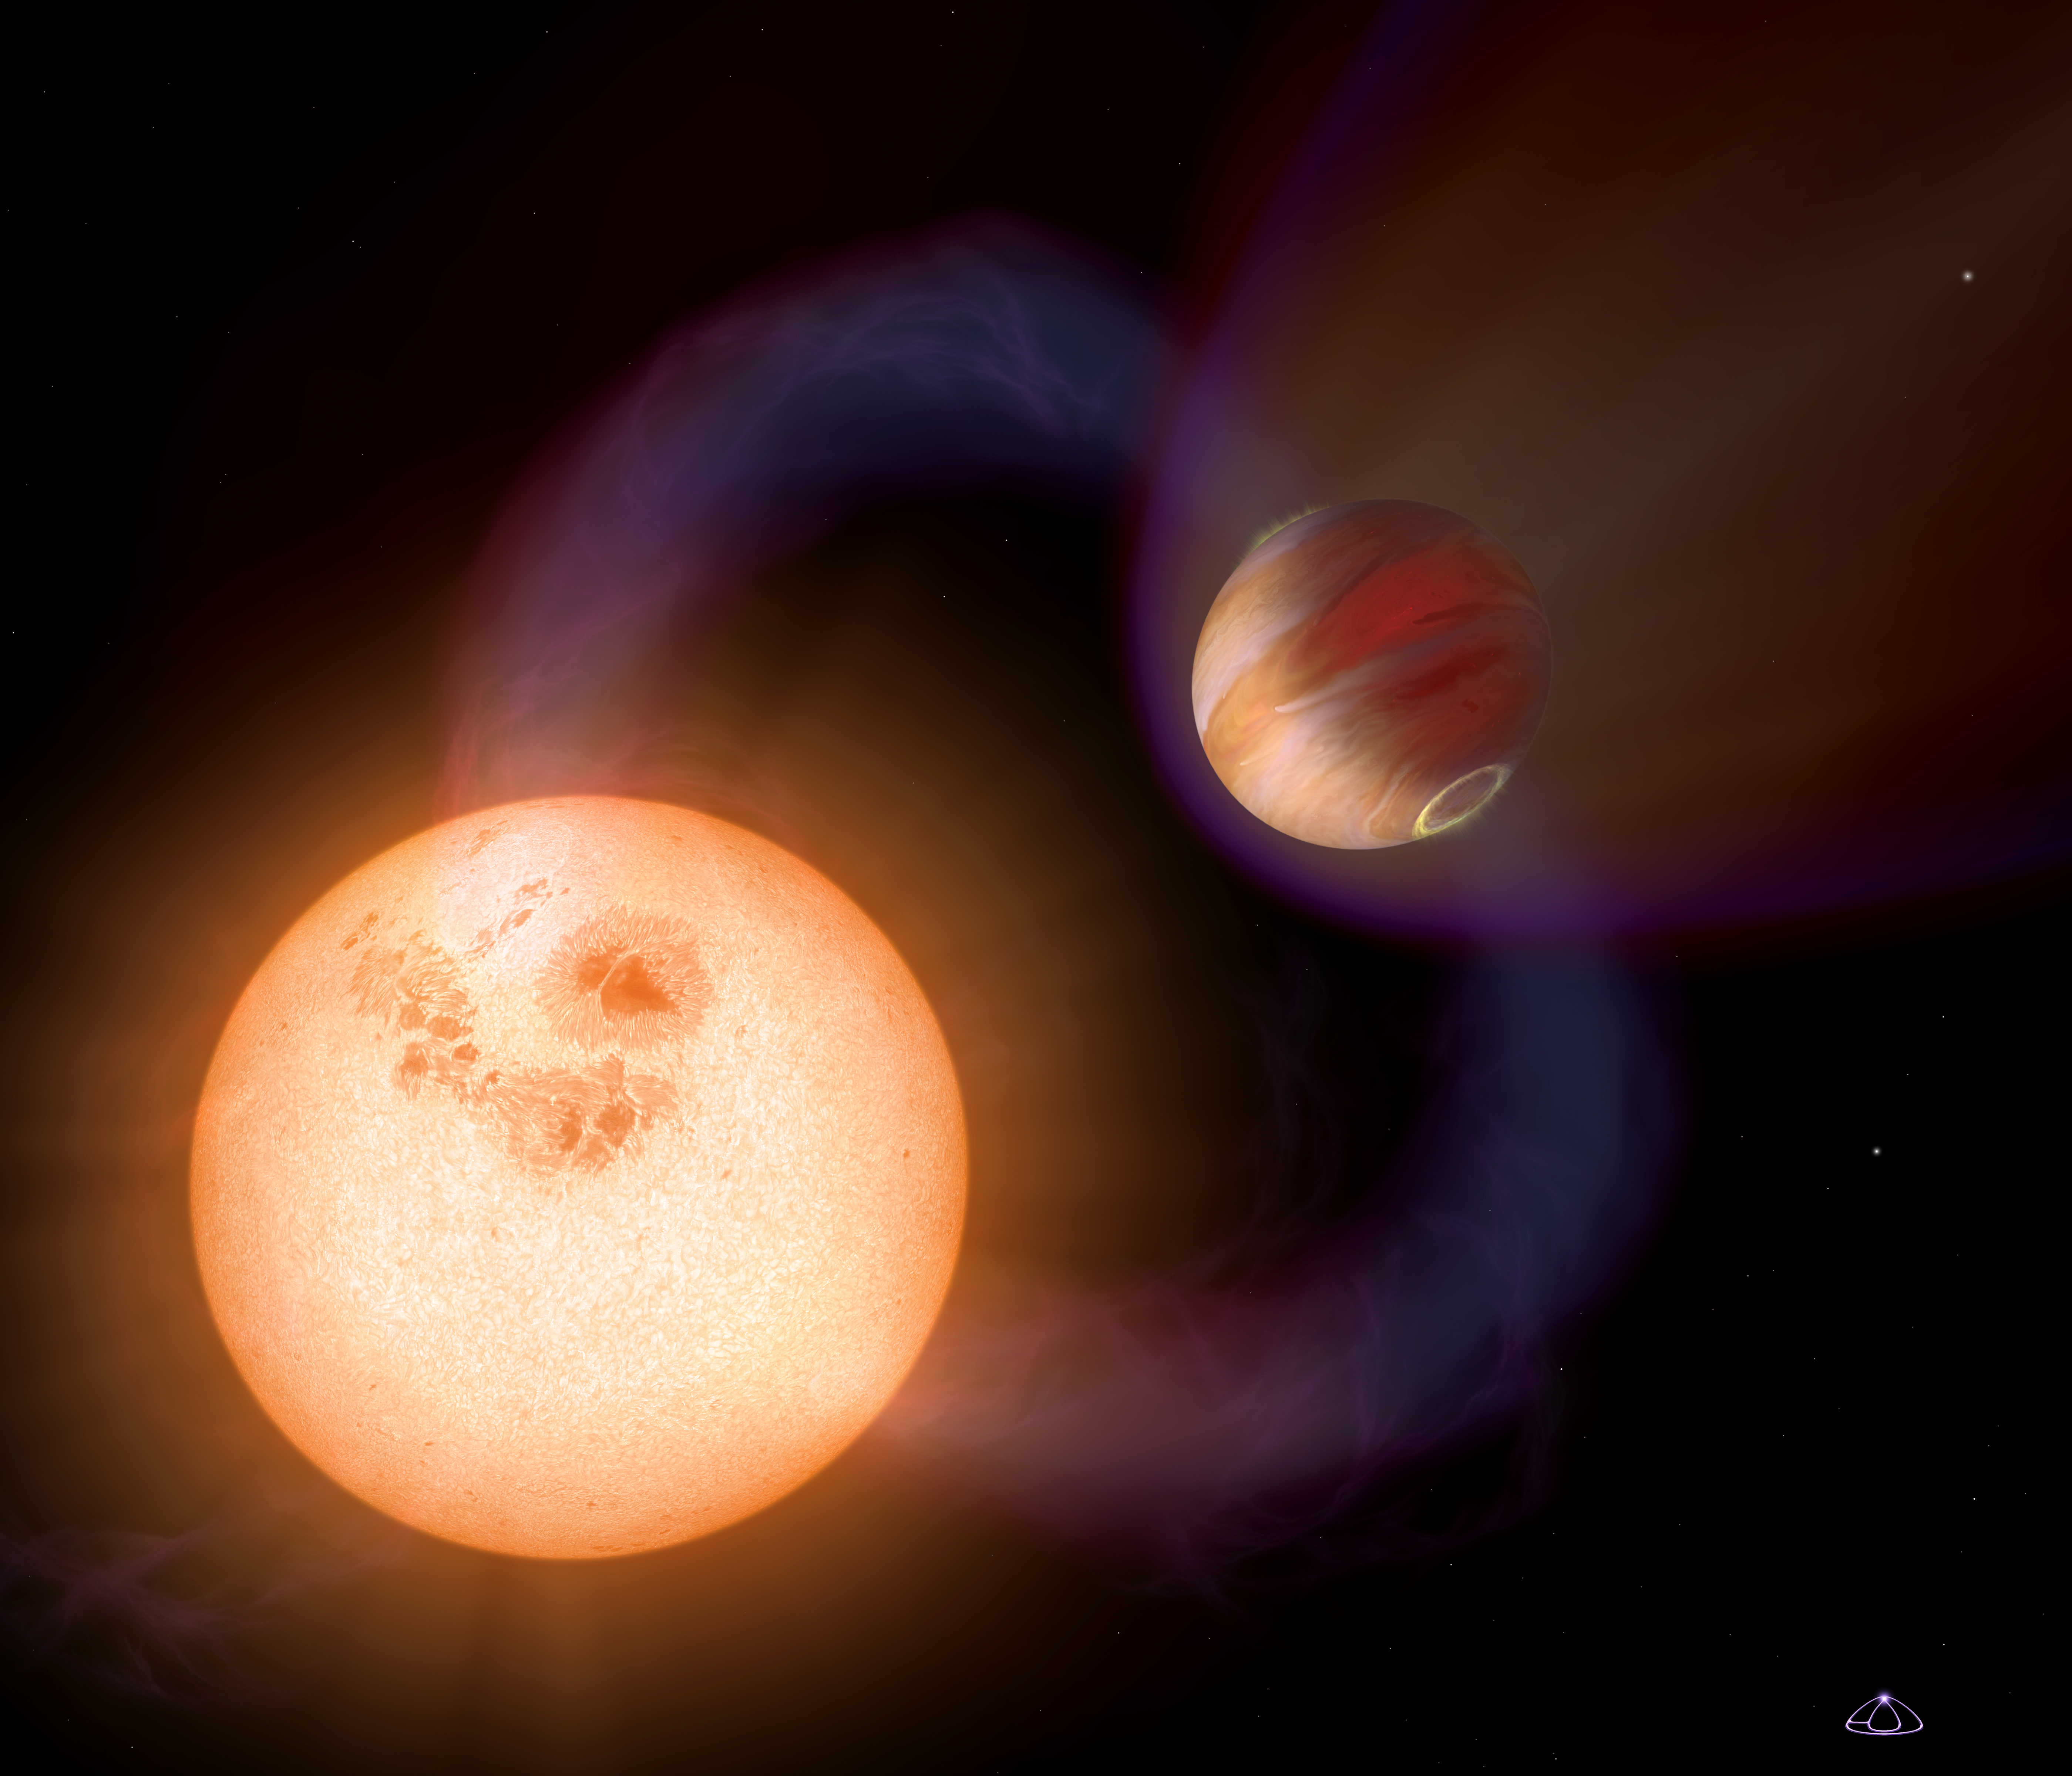

Artist's impression of an ultra-short-period planet

This is an artist's impression of a unique type of extrasolar planet discovered with the Hubble Space Telescope. The planet is so close it to its star that it completes an orbit in 10.5 hours. The planet is only 750,000 miles (about 1207 kilometres) from the star, or 1/130th the distance between Earth and the Sun.

The Jupiter-sized planet orbits an unnamed red dwarf star that lies in the direction of the Galactic Centre; the exact stellar distance is unknown. Hubble detected the planet in a survey that identified 16 Jupiter-sized planets in short-period, edge-on orbits (as viewed from Earth) that pass in front of their parent stars. Hubble could not see the planets, but measured the dimming of starlight as the planets passed in front of their stars.

This illustration presents a purely speculative view of what such a "hot Jupiter" might look like. It could have a powerful magnetic field that traps charged particles from the star. These particles create glowing auroral rings around the planet's magnetic poles. A powerful magnetic flux tube links the planet and star. This enhances stellar activity and triggers powerful flares. A powerful stellar wind creates a bow shock around the planet. The planet's atmosphere seethes at 1,650 degrees Celsius.

Credit: NASA, ESA and A. Schaller (for STScI)